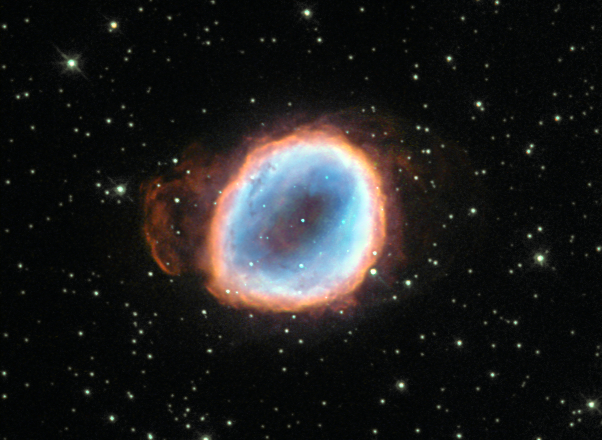

The long goodbye

A dying star’s final moments are captured in this image from the NASA/ESA Hubble Space Telescope. The death throes of this star may only last mere moments on a cosmological timescale, but this star’s demise is still quite lengthy by our standards, lasting tens of thousands of years!

The star’s agony has culminated in a wonderful planetary nebula known as NGC 6565, a cloud of gas that was ejected from the star after strong stellar winds pushed the star’s outer layers away into space. Once enough material was ejected, the star’s luminous core was exposed and it began to produce ultraviolet radiation, exciting the surrounding gas to varying degrees and causing it to radiate in an attractive array of colours. These same colours can be seen in the famous and impressive Ring Nebula (heic1310), a prominent example of a nebula like this one.

Planetary nebulae are illuminated for around 10 000 years before the central star begins to cool and shrink to become a white dwarf. When this happens, the star’s light drastically diminishes and ceases to excite the surrounding gas, so the nebula fades from view.

A version of this image was entered into the Hubble’s Hidden Treasures basic image competition by contestant Matej Novak.

Credit: ESA/Hubble & NASA Acknowledgement: M. Novak